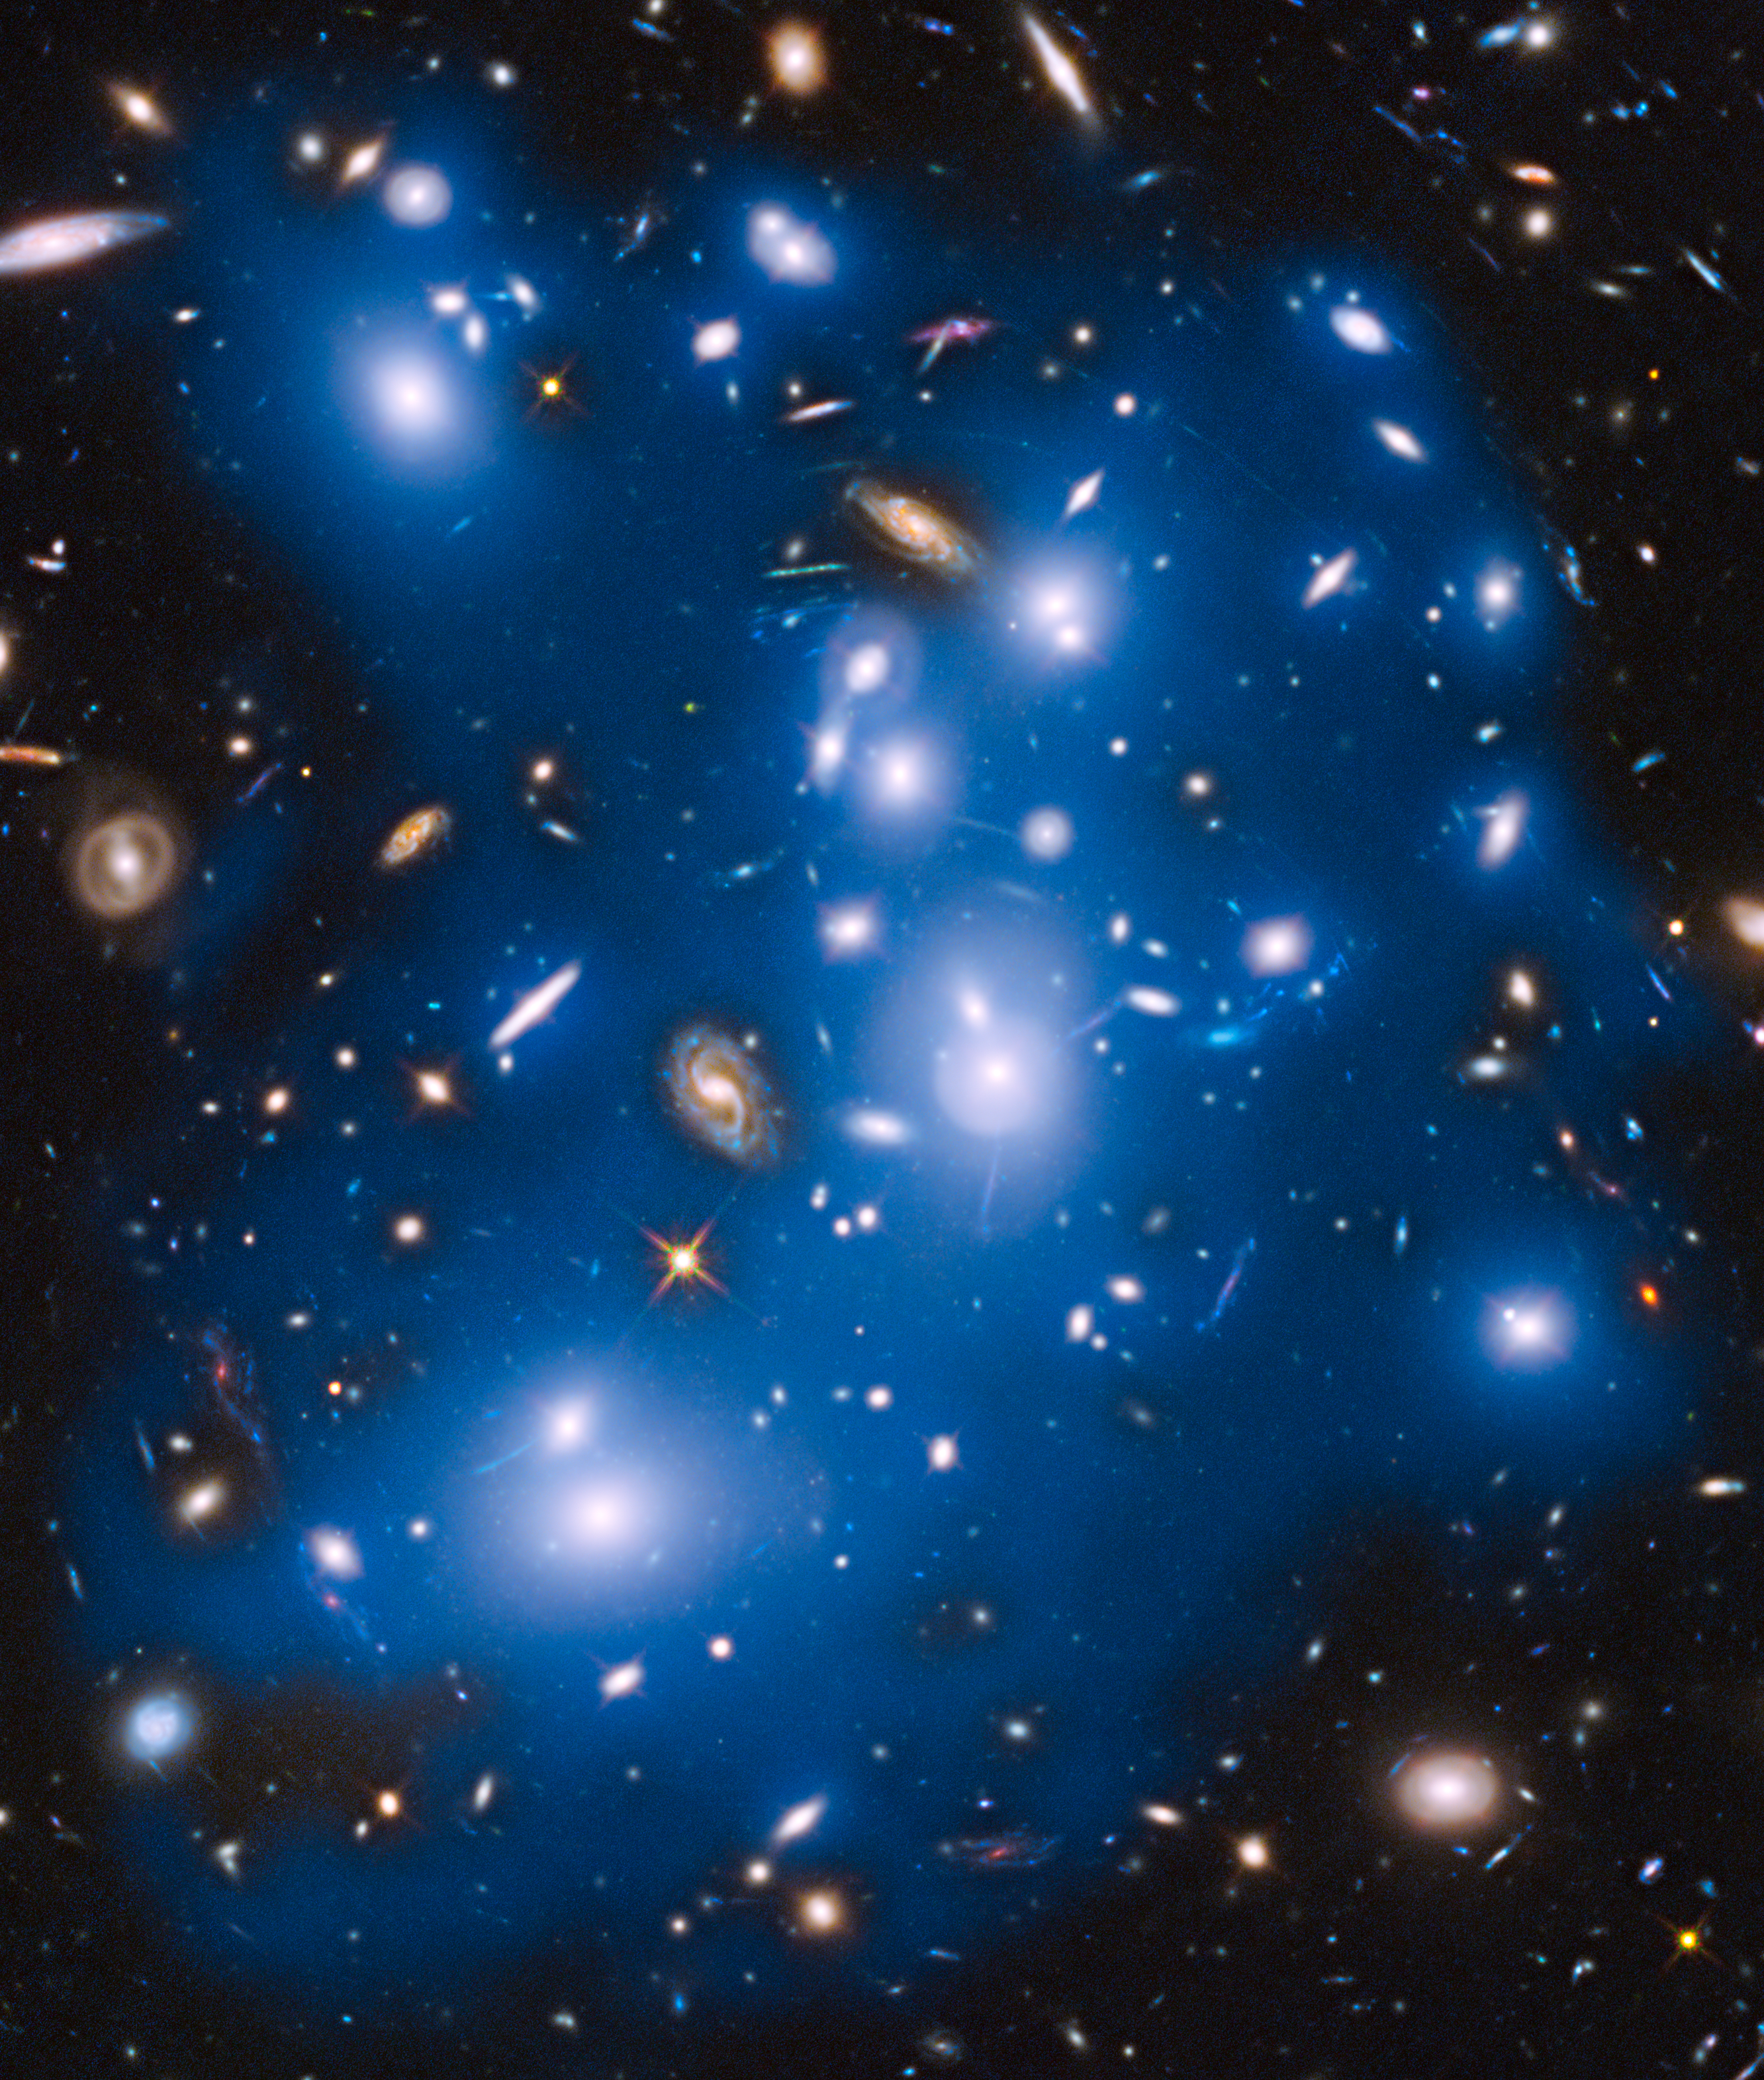

Hubble sees ghost light from dead galaxies in galaxy cluster Abell 2744

The massive galaxy cluster Abell 2744, nicknamed Pandora's Cluster, takes on a ghostly look in this NASA/ESA Hubble Space Telescope view.

In this image the total starlight from the cluster has been artificially coloured blue. This reveals that not all the starlight is contained within the cities of stars — the galaxies — which appear as bright blue-white blobs. A fraction of the starlight is also dispersed throughout the cluster, as seen in the darker blue regions.

This light comes from dead galaxies. The galaxies were torn apart long ago by the cluster's gravitational forces, and their stars were scattered into what is known as intracluster space — the space between the galaxies.

These orphaned stars roam the cluster, without being gravitationally tethered to any single galaxy. Because these extremely faint stars are brightest at near-infrared wavelengths of light, this type of observation could only be accomplished with Hubble’s infrared sensitivity to extraordinarily dim light.

The galaxies that are not coloured blue are either in the foreground or background and are not part of the cluster.

Credit: NASA, ESA, M. Montes (IAC), and J. Lotz, M. Mountain, A. Koekemoer, and the HFF Team (STScI)